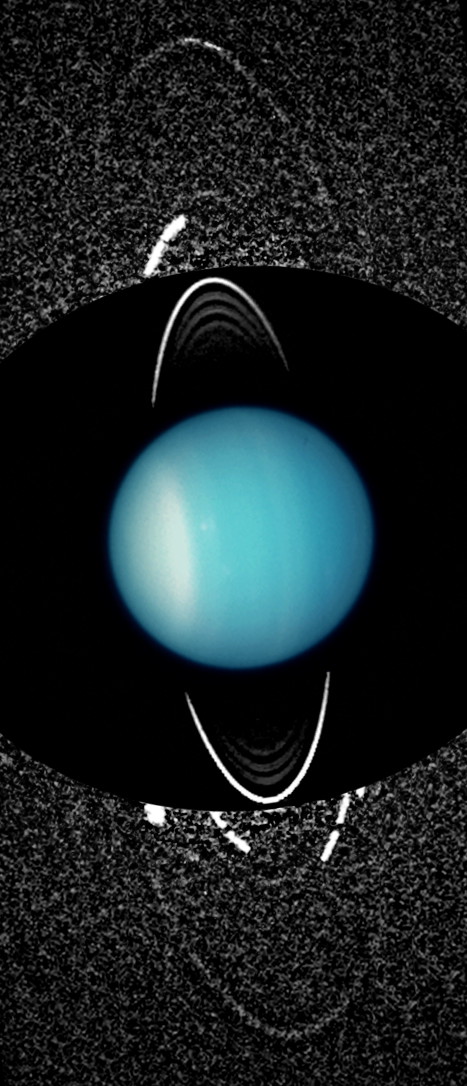

Uranus: 2003 (Unannotated)

Even though the Voyager 2 spacecraft paid a close-up visit to Uranus in 1986, the distant planet continues revealing surprises to the eye of NASA's Hubble Space Telescope. Hubble’s high sensitivity and sharp view has uncovered a pair of giant rings girdling the planet. The largest is twice the diameter of the planet’s previously known ring system, first discovered in the late 1970s. Hubble also spied two small satellites, named Mab and Cupid. One of the satellites shares an orbit with the outermost of the new rings. The satellite is probably the source of fresh dust that keeps replenishing the ring with new material knocked off the satellite from meteoroid impacts. Without such replenishment, the dust in the ring would slowly spiral in toward Uranus. Collectively, these new discoveries mean that Uranus has a youthful and dynamic system of rings and moons. Because of the extreme tilt of Uranus's axis, the ring system appears nearly perpendicular relative to rings around other gas giant planets like Saturn. Also, unlike Saturn, the rings are very dark and dim because they are mostly dust rather than ice.

Credit: NASA, ESA, and M. Showalter (SETI Institute)